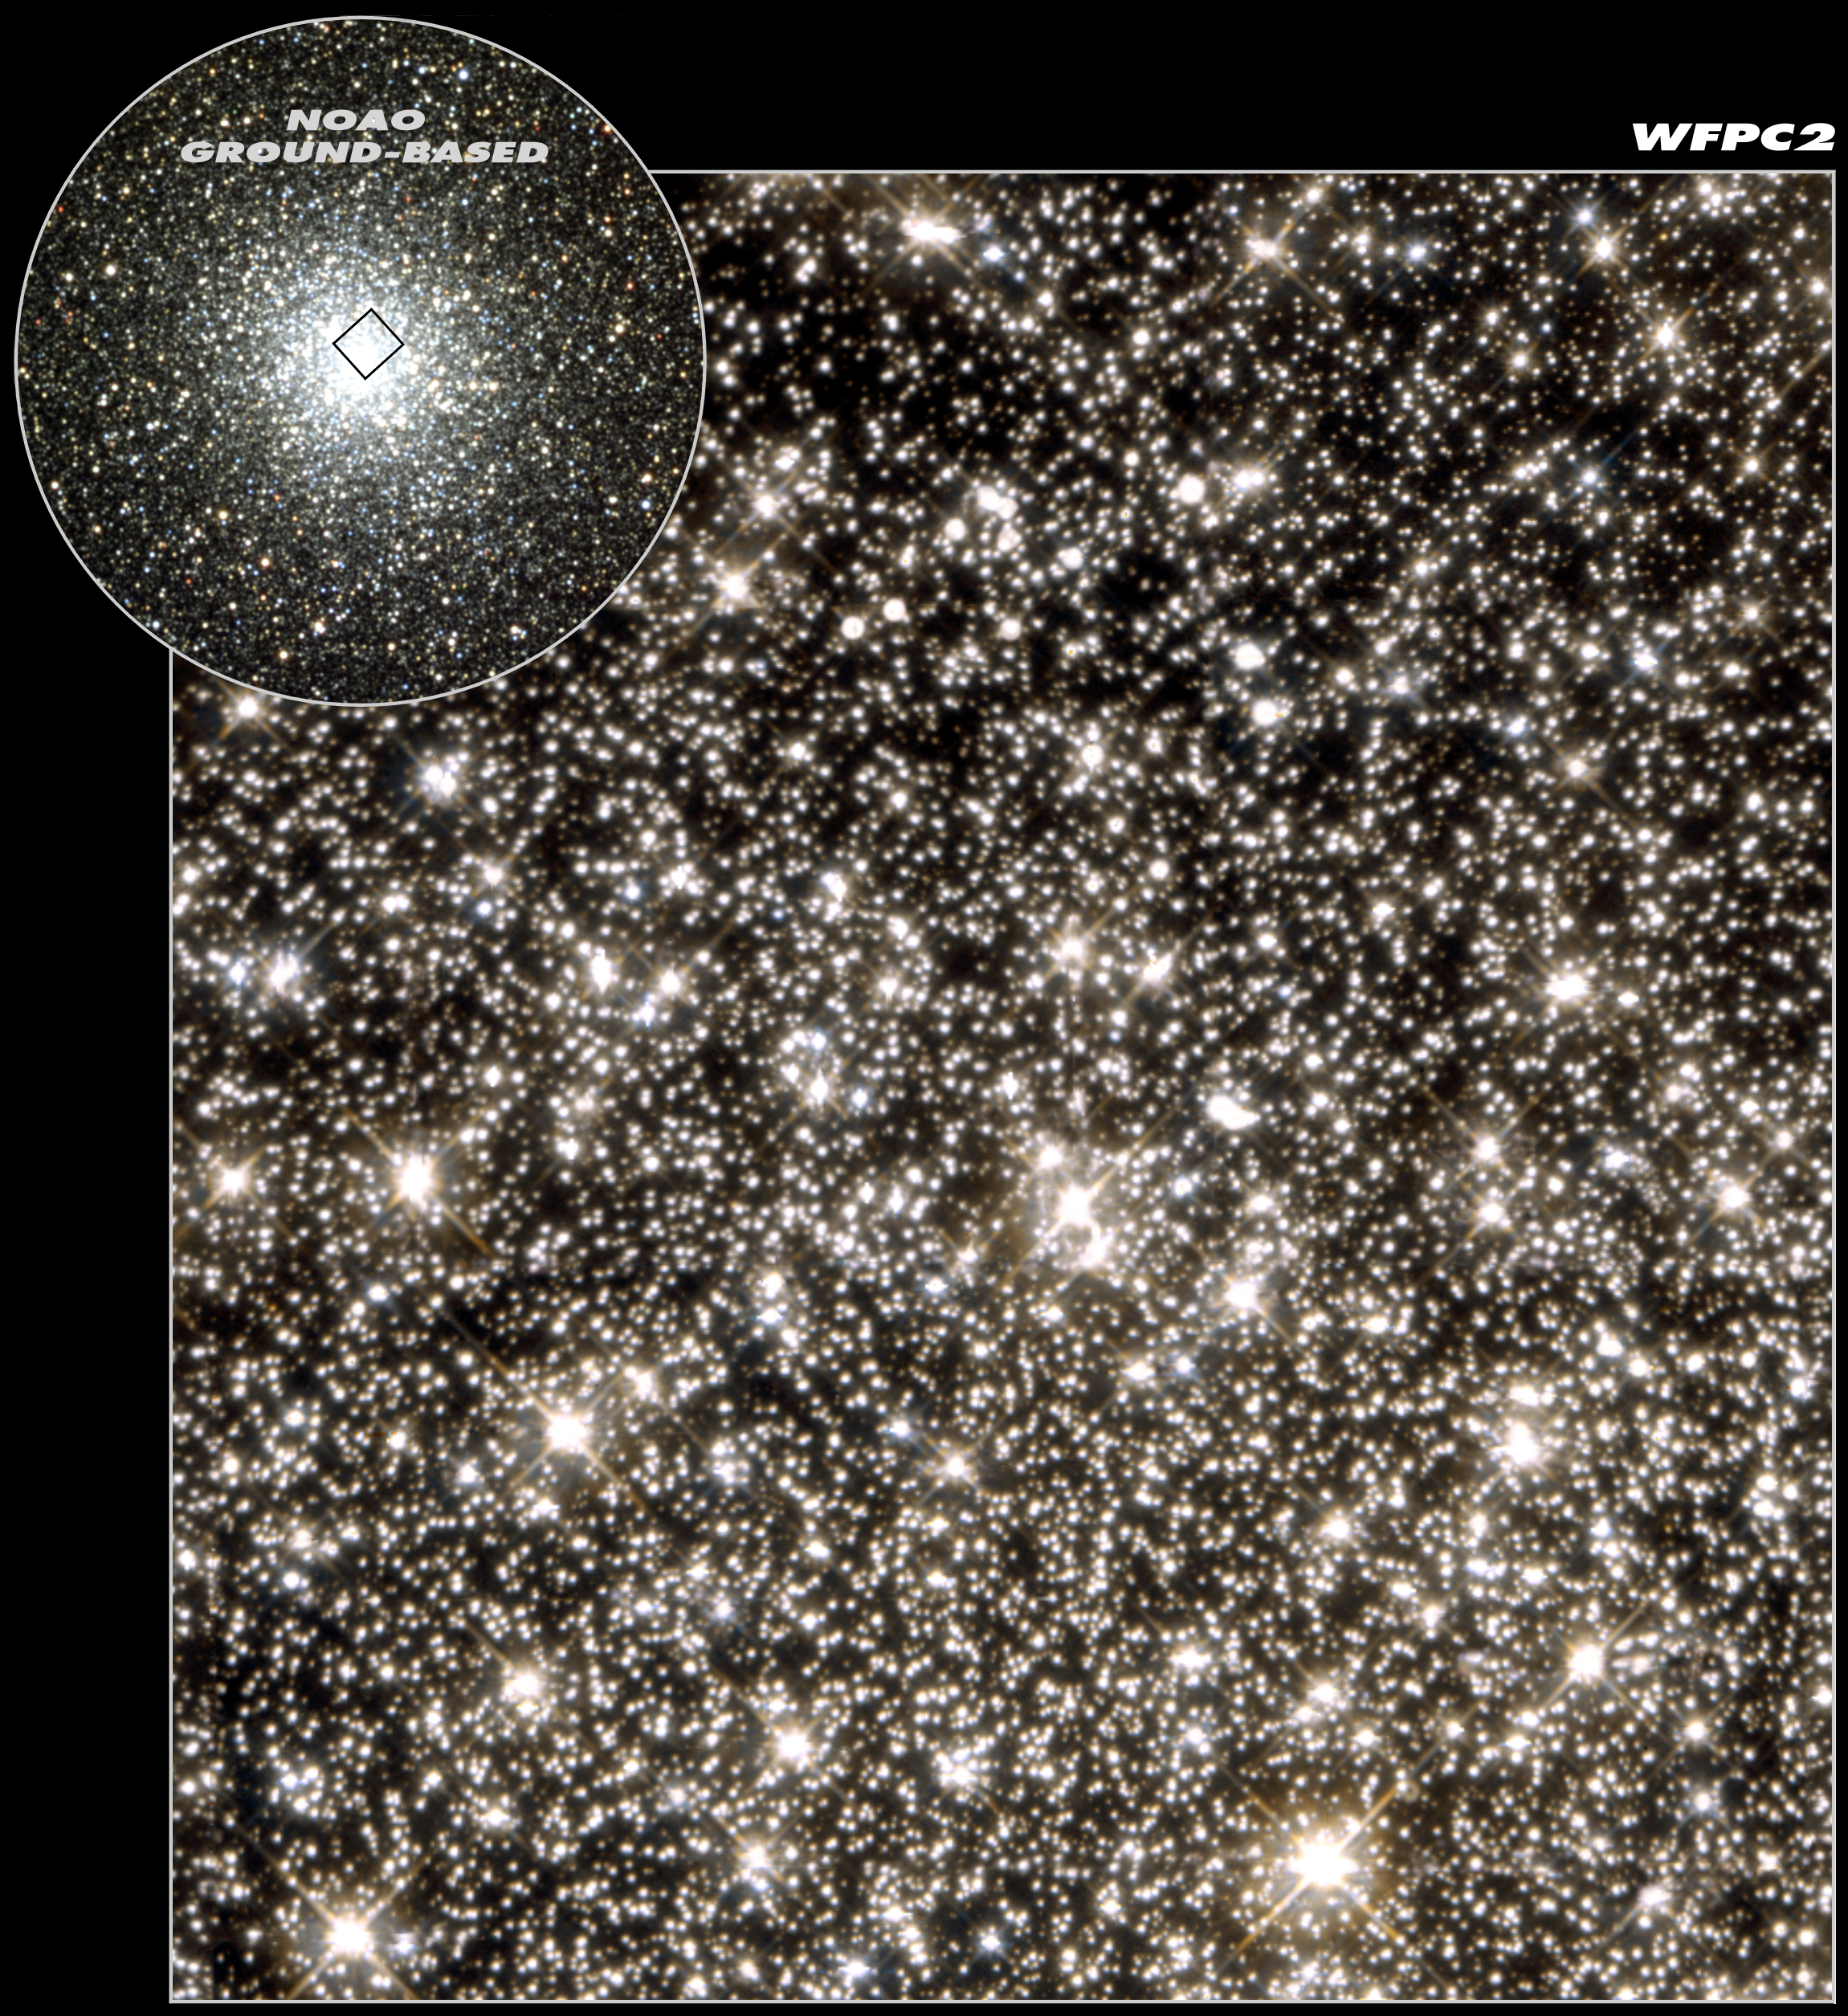

Hint of planet-sized drifters bewilders Hubble scientists (combined view)

This image shows the globular cluster M22 as seen with the NASA/ESA Hubble Space Telescope's workhorse instrument, the Wide Field and Planetary Camera 2 (WFPC2). A team of American and European astronomers has studied the cluster in search for traces of short-lived brightening, due to an effect called microlensing, of faint stars in the background (too faint to be seen in this representation). Seven microlensing events were seen - one 'normal' event where a dwarf star in M22 passed in front of a background star, and six short events strongly suggesting the existence of 'free-floating' planet-sized objects in M22. If confirmed these planets would be the smallest detected which are not orbiting any star. In the upper left corner is a ground-based view of M22 showing the position of the WFPC2 image. M22, also known as NGC 6656, is the brightest globular cluster visible from the Northern hemisphere and it is an easy naked-eye object. The 12 to 14 billion year old cluster is about 8500 light years distant and about 65 light years across. Its angular diameter is 24 arcminutes or almost the size of the full Moon. This Hubble view measures about 3 light years across.

Credit: NASA, ESA & K. Sahu (STScI)